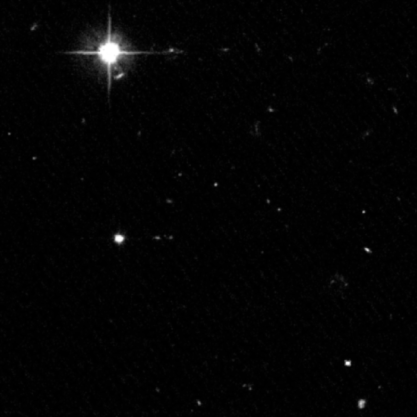

Farthest, Faintest Solar System Objects Found Beyond Neptune

Astronomers using NASA's Hubble Space Telescope have discovered three of the faintest and smallest objects ever detected beyond Neptune. Each object is a lump of ice and rock — roughly the size of Philadelphia — orbiting beyond Neptune and Pluto, where the icy bodies may have dwelled since the formation of the solar system 4.5 billion years ago.

Credit: NASA/ESA, G. Bernstein and D. Trilling (University of Pennsylvania)